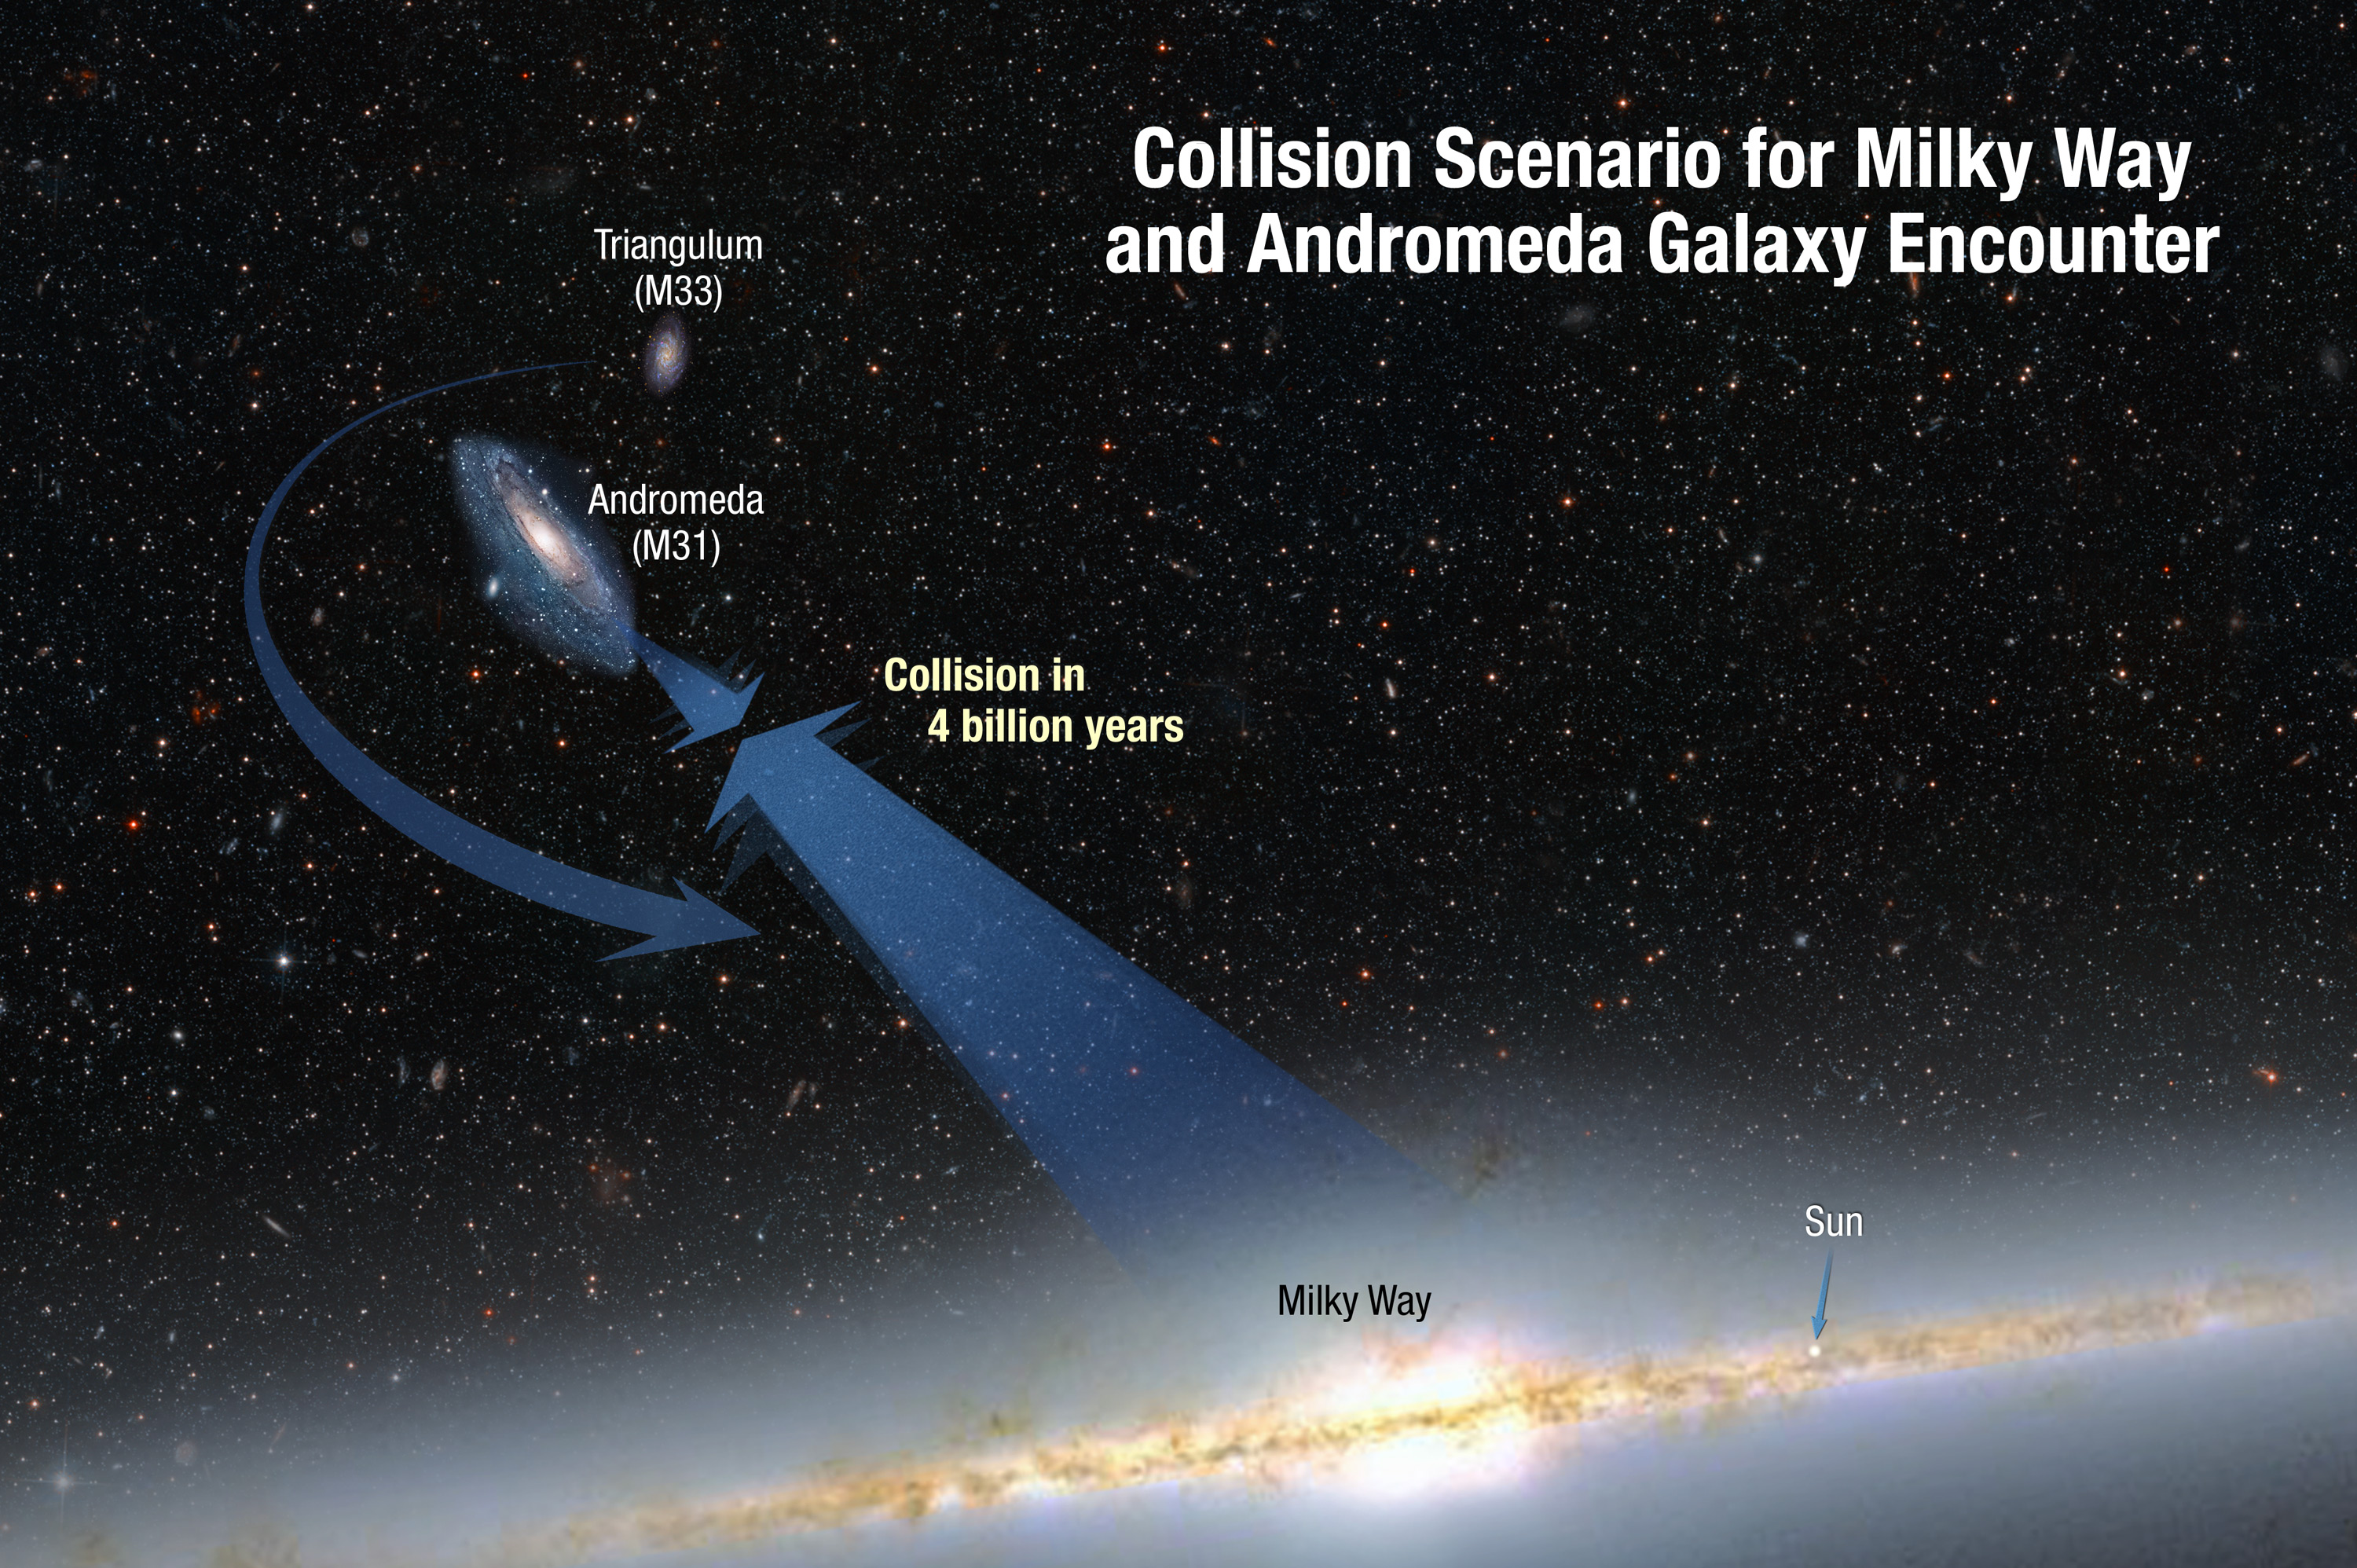

Collision Scenario for Milky Way and Andromeda Galaxy Encounter

This illustration shows the inevitable collision between our Milky Way galaxy and the Andromeda galaxy approximately 4 billion years from now. The galaxies are moving toward each other under the inexorable pull of gravity between them. A smaller galaxy, Triangulum, may be part of the smashup.

Credit: NASA, ESA, and A. Feild and R. van der Marel (STScI)